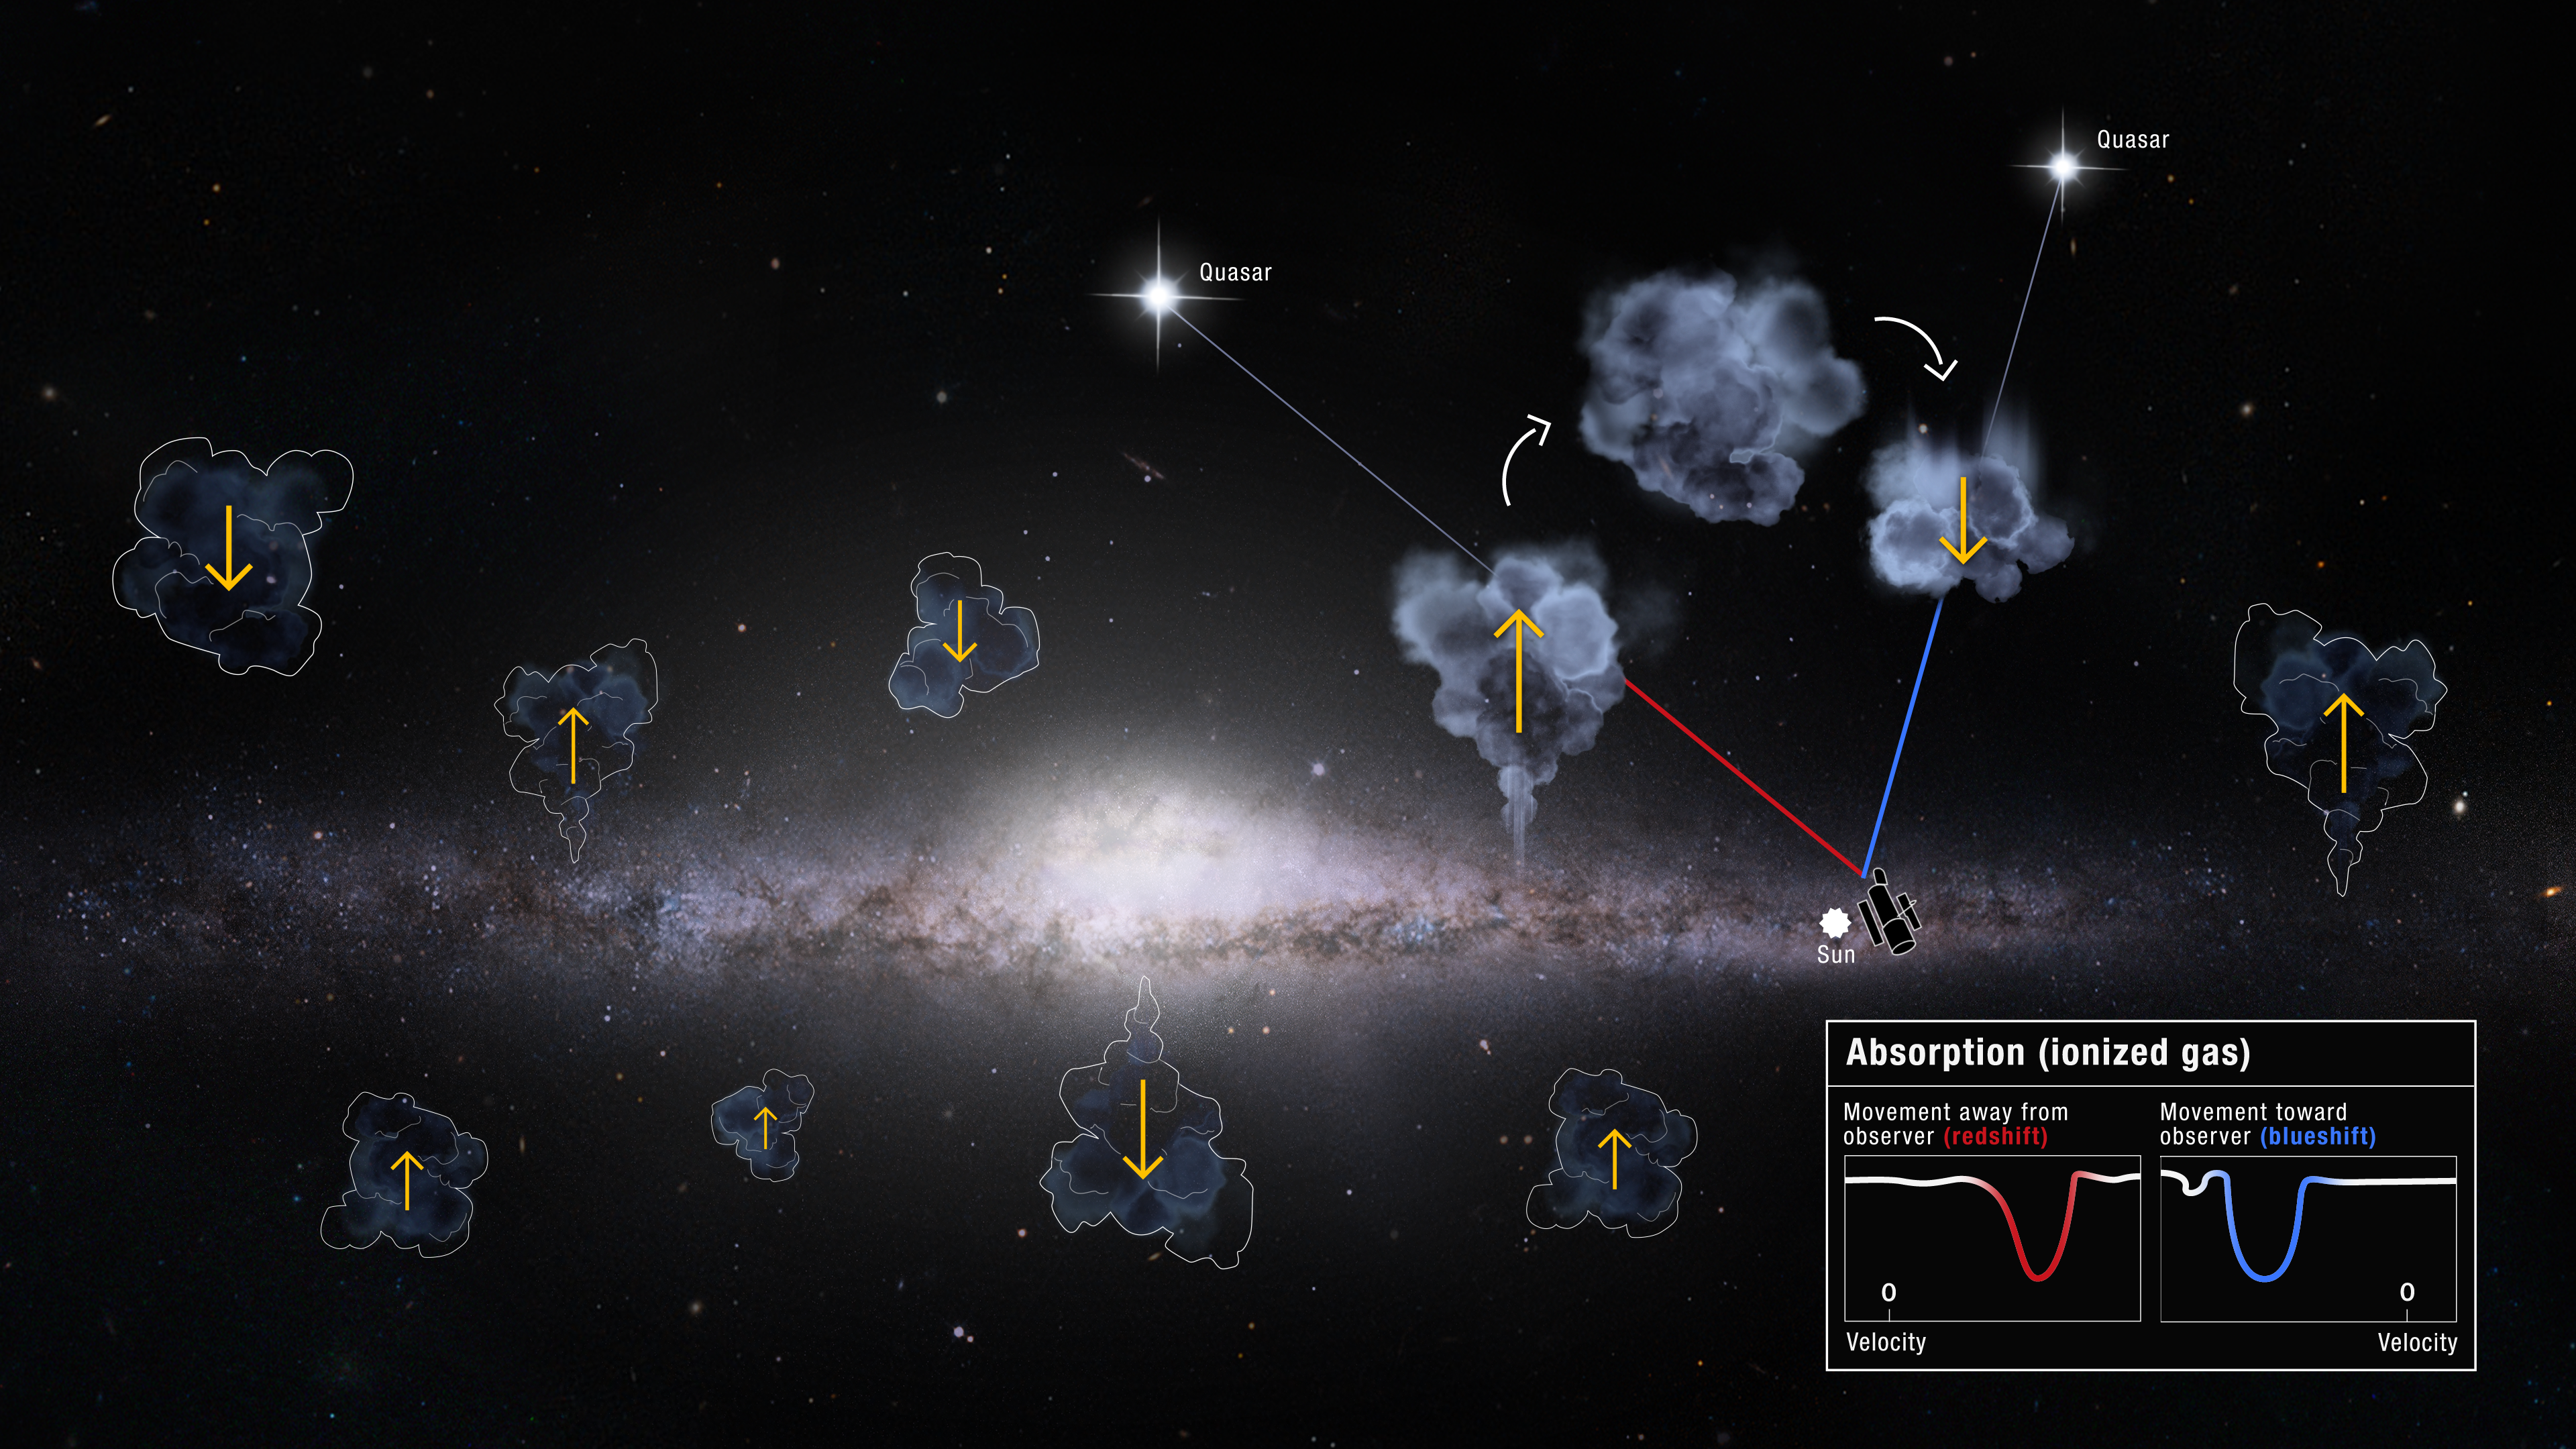

Artist's impression of Milky Way inflows and outflows

This illustration envisions the Milky Way galaxy's gas recycling above and below its stellar disk. The NASA/ESA Hubble Space Telescope observes the invisible gas clouds rising and falling with its sensitive Cosmic Origins Spectrograph (COS) instrument. The spectroscopic signature of the light from background quasars shining through the clouds gives information about their motion. Quasar light is redshifted in clouds shooting up and away from the galactic plane, while quasar light passing through gas falling back down appears blueshifted. This differentiation allows Hubble to conduct an accurate audit of the outflowing and inflowing gas in the Milky Way's busy halo—revealing an unexpected and so-far unexplained surplus of inflowing gas.

Astronomers have discovered an unexplained surplus of gas flowing into our Milky Way after conducting a galaxy-wide audit of outflowing and inflowing gas. Rather than a gas equilibrium and "balanced books," ten years of data from the Hubble Space Telescope showed there is more gas coming in than going out.

Credit: NASA, ESA, and D. Player (STScI)